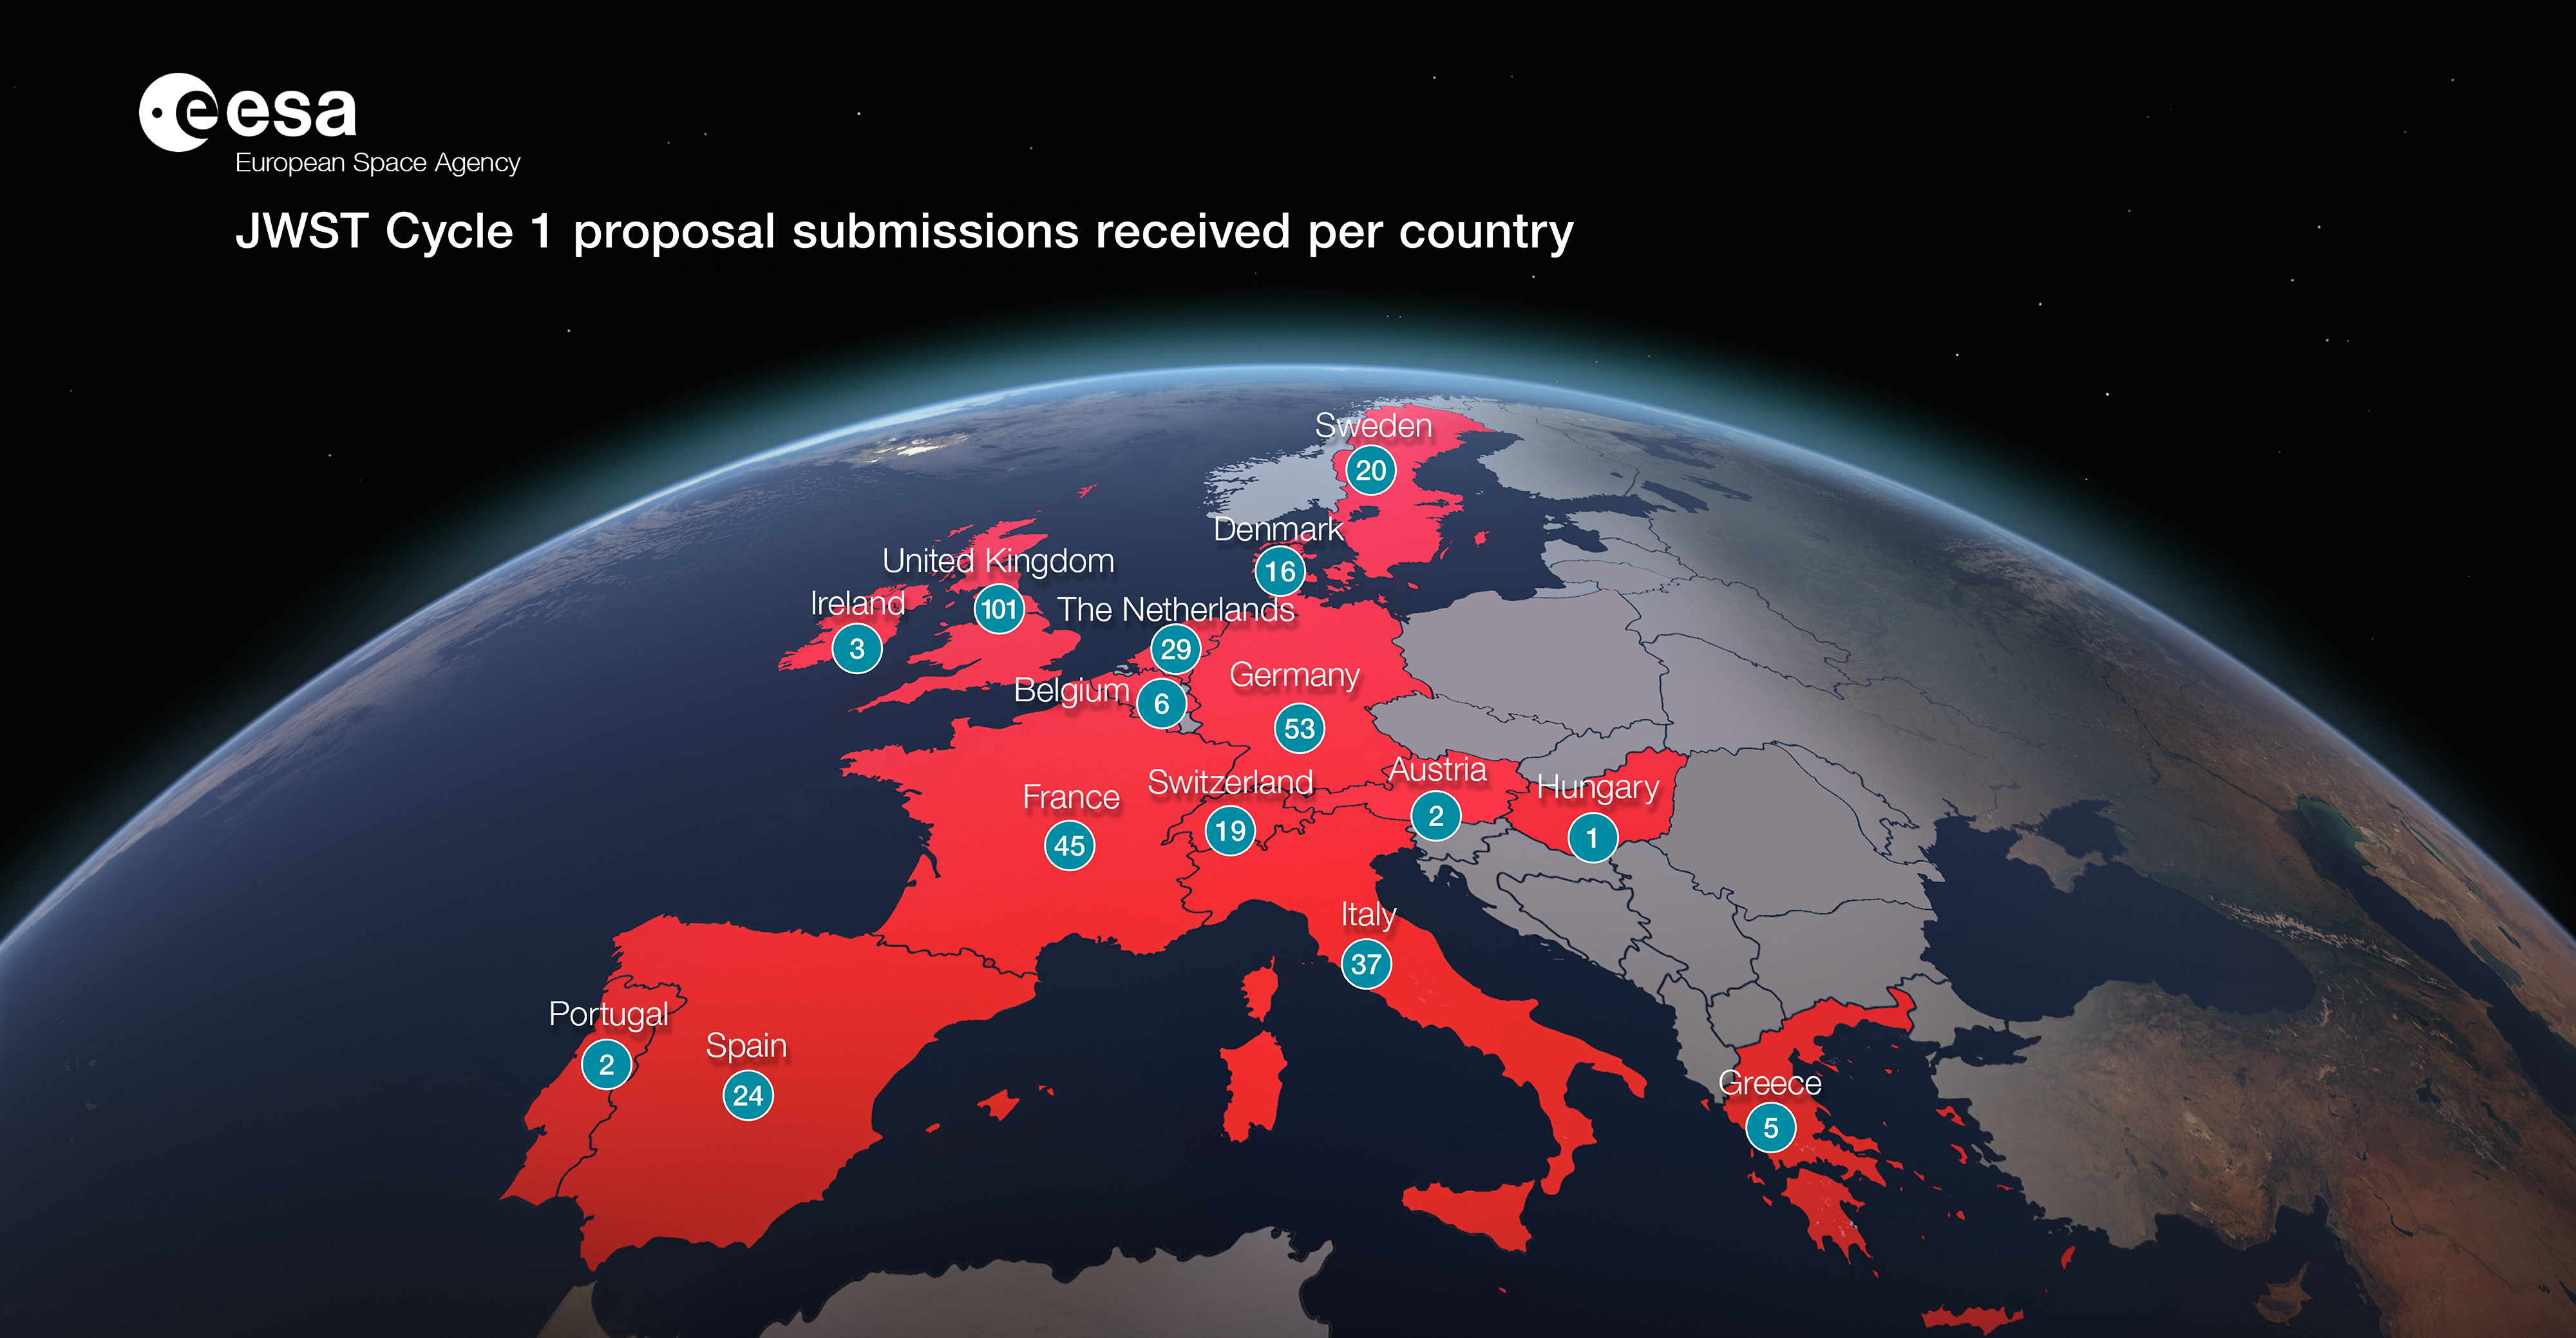

JWST Cycle 1 Proposal Submissions Received by Country

JWST Cycle 1 Proposal Submissions Received by Country.

Credit: ESA/Hubble